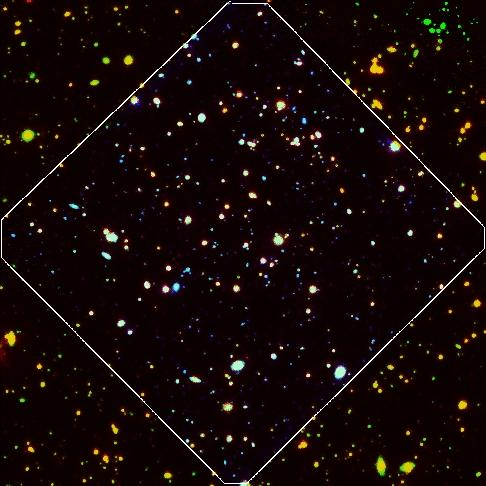

HUDF: if human eyes could see in the way that Spitzer can see

The look of the HUDF (outlined area) if human eyes could see in the way that Spitzer can see. The red colour of this picture comes from the deepest infrared observations made by the GOODS team using Spitzer. Within the HUDF, which is about 1% the size of the full Moon, the GOODS astronomers have identified 17 galaxies with extremely red colors.

Credit: NASA, ESA, A. M. Koekemoer (STScI), M. Dickinson (NOAO) and The GOODS Team